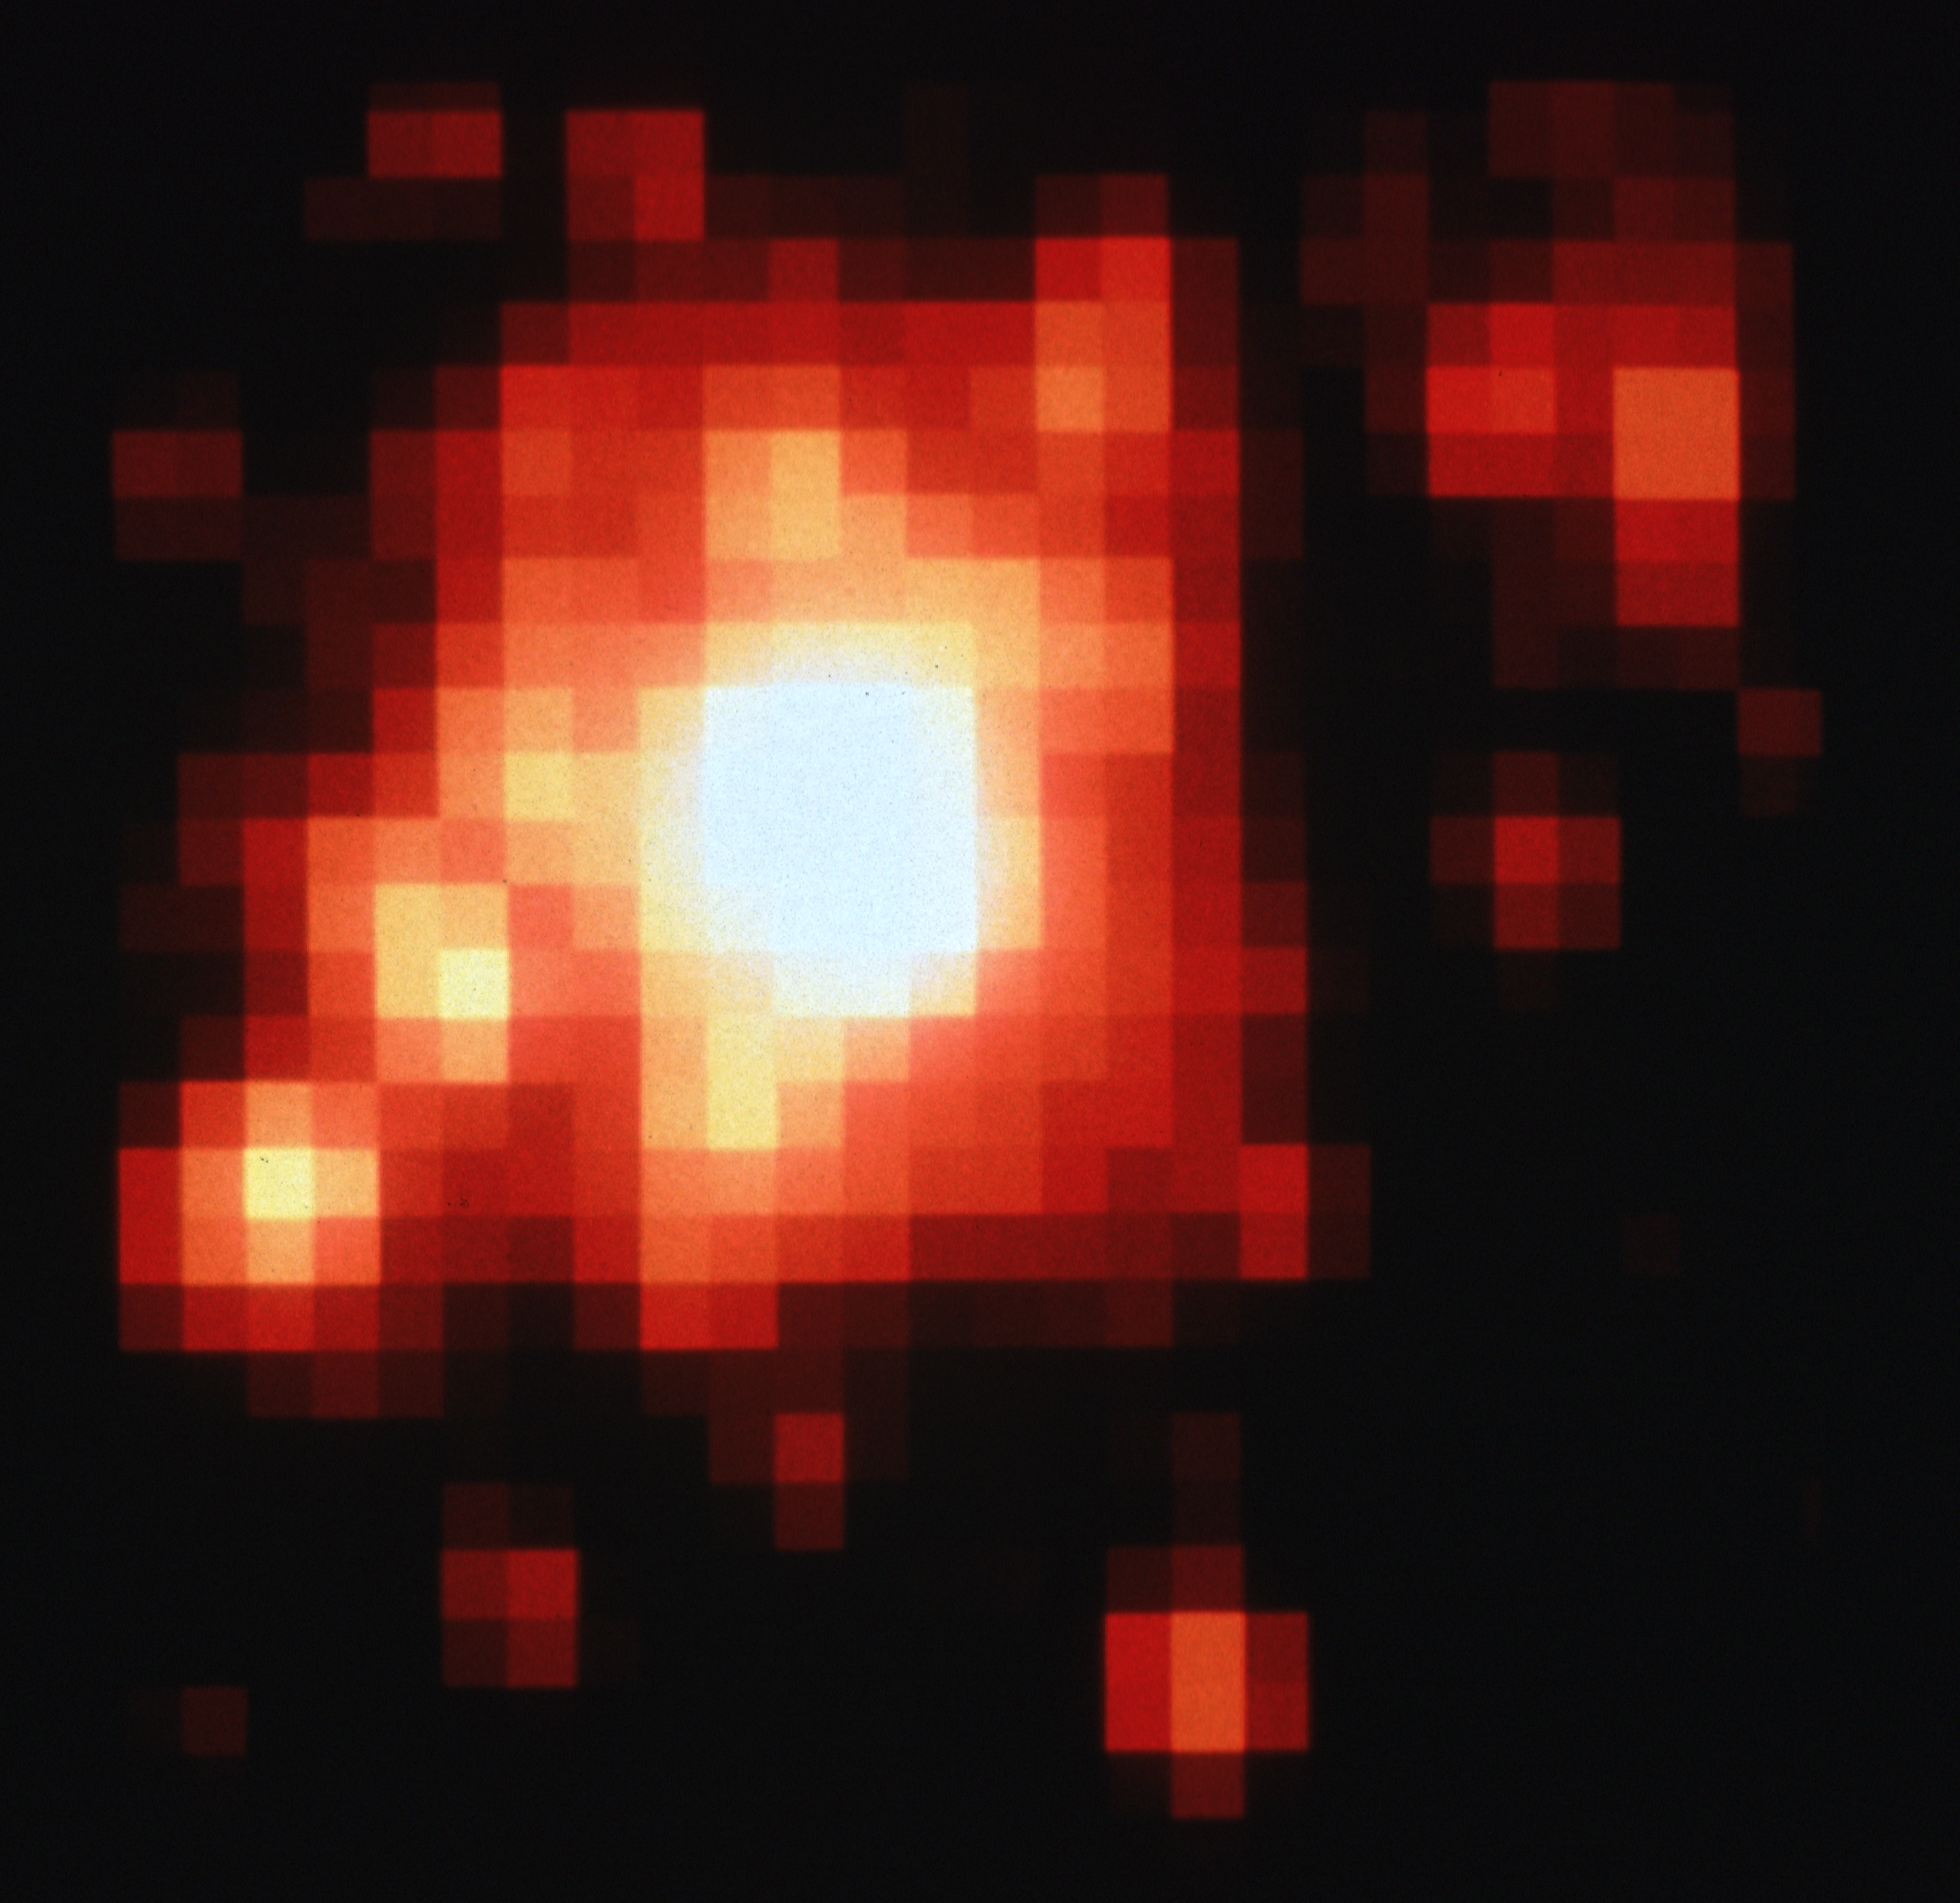

Star cluster R136 - ESO 2.2m Telescope

This is a 2.7 X 2.7 arc minute view of star cluster R136 as seen from a ground-based telescope under exceptional observing conditions. Star images are as small as 0.6 arc second.

Credit: George Meylan and ESO